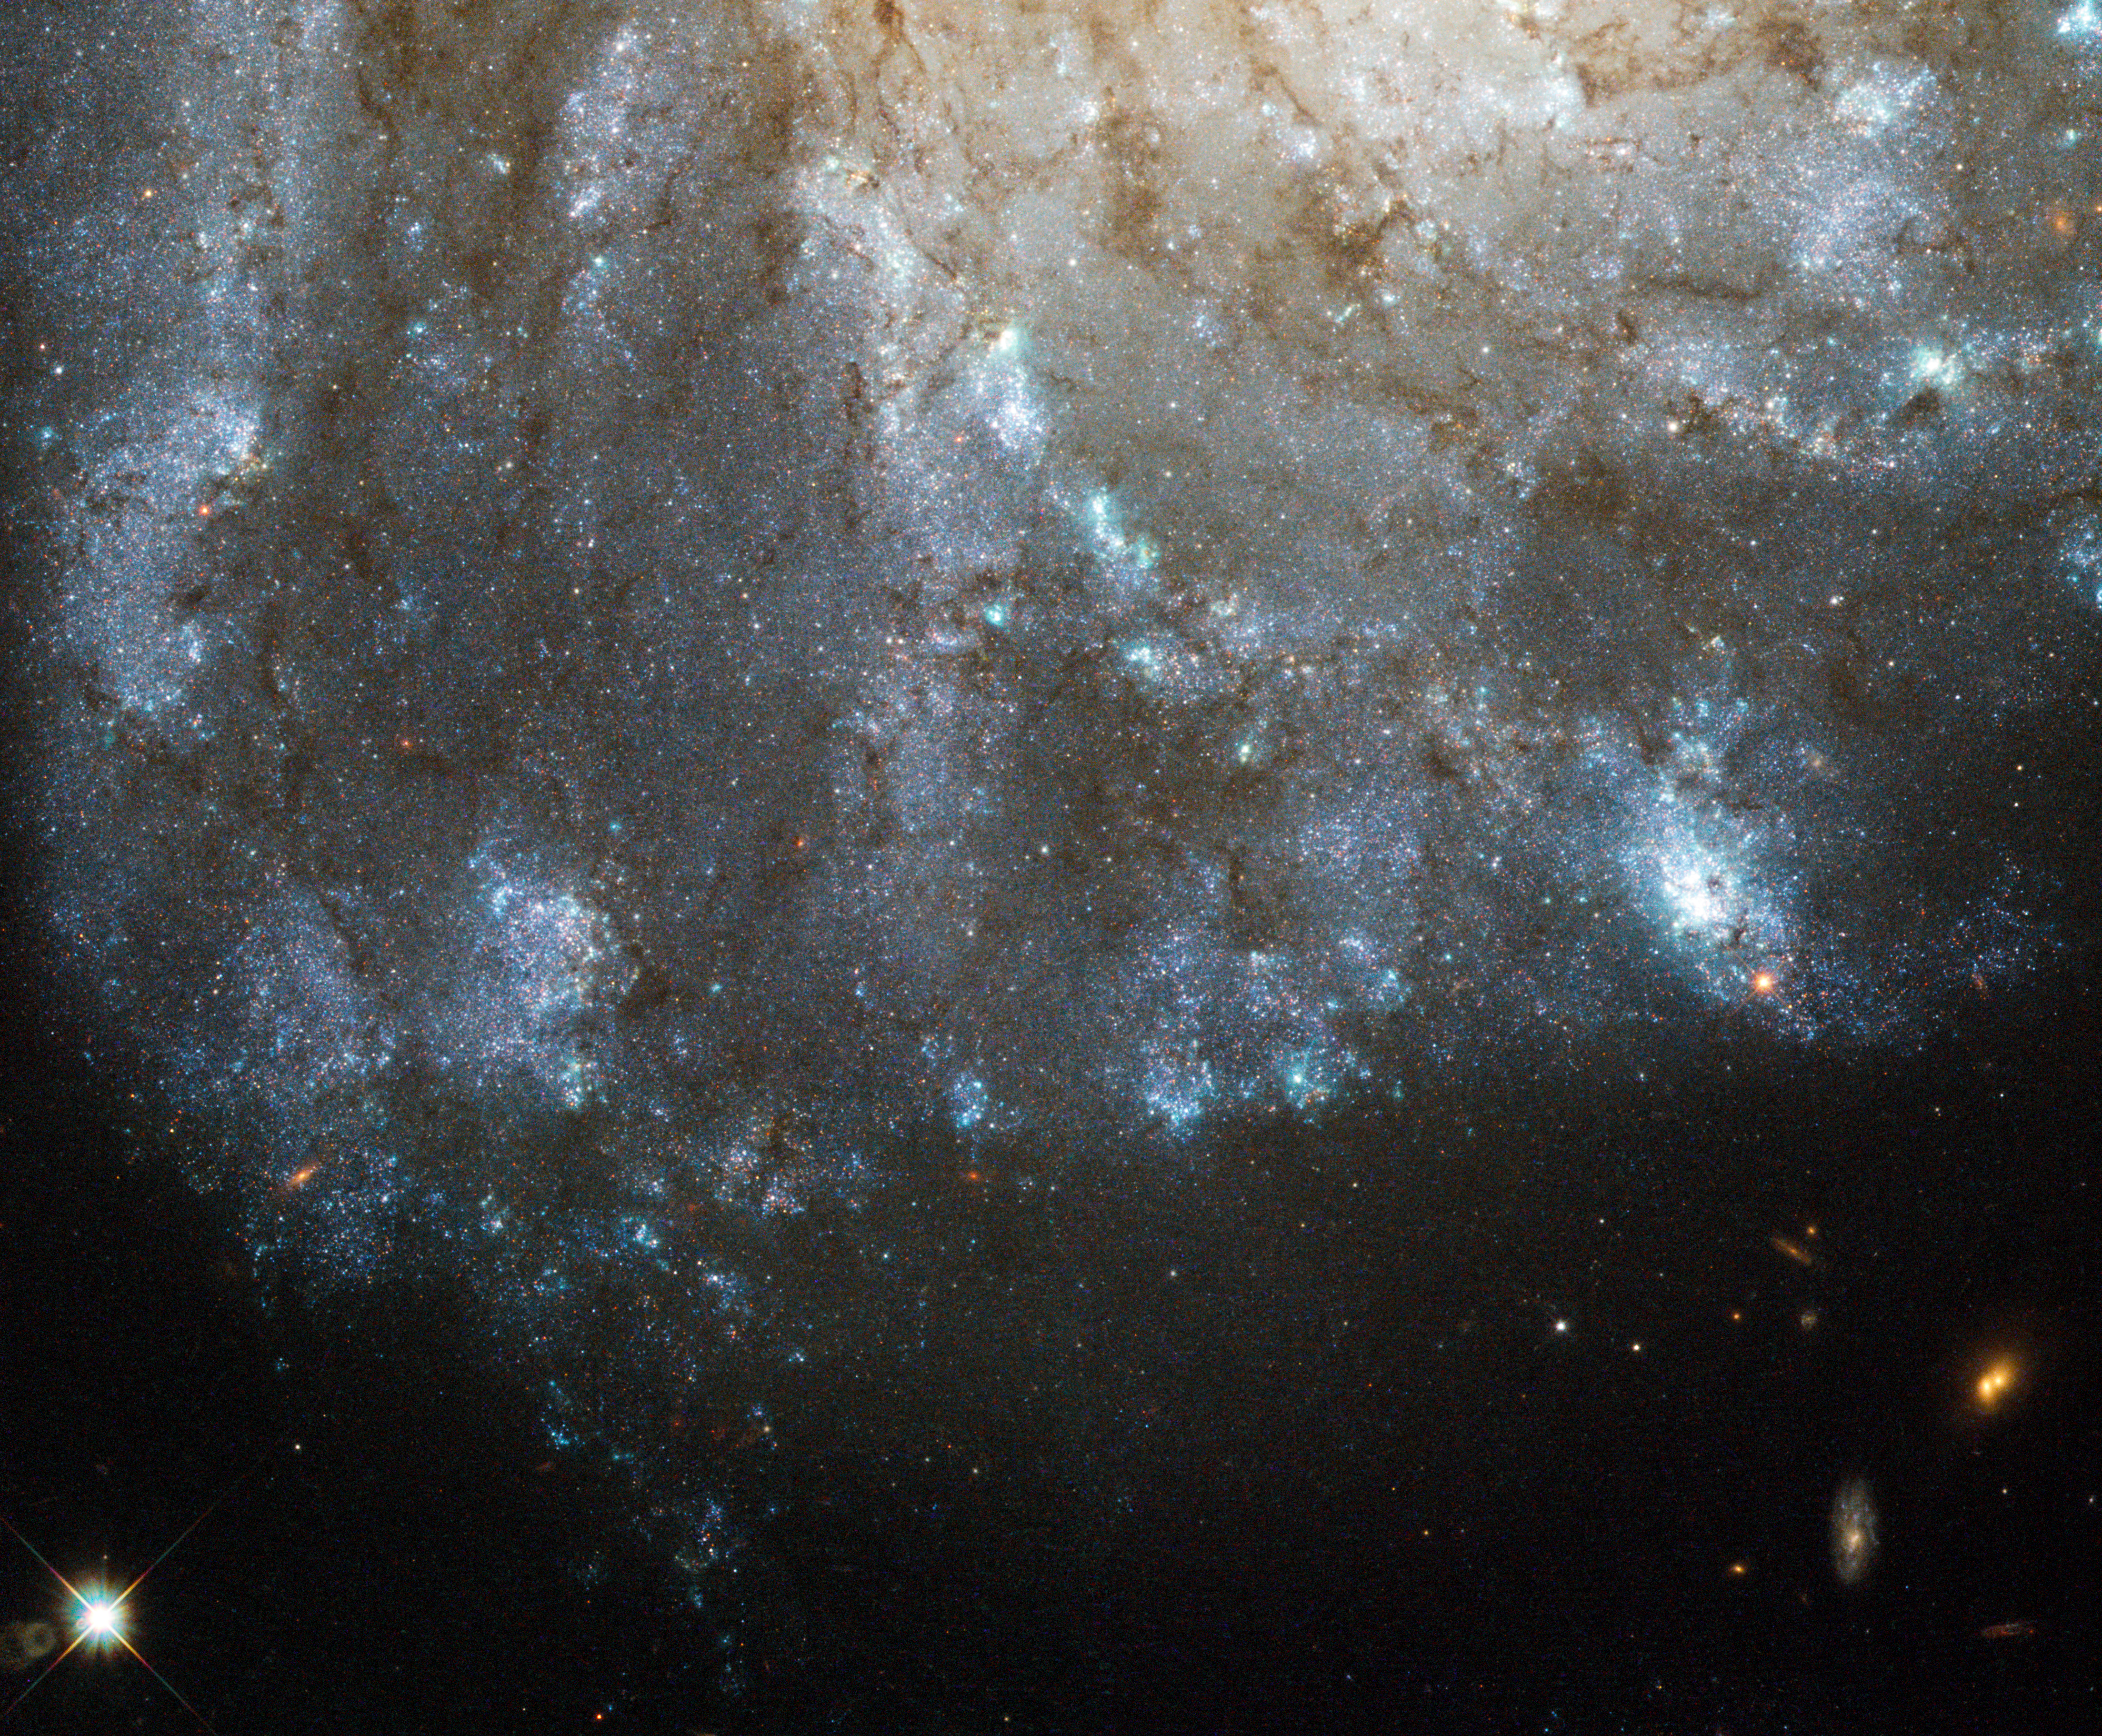

A bright spark in a nearby spiral galaxy

This image, taken by the NASA/ESA Hubble Space Telescope, shows a detailed view of the spiral arms on one side of the galaxy Messier 99. Messier 99 is a so-called grand design spiral, with long, large and clearly defined spiral arms — giving it a structure somewhat similar to the Milky Way.

Lying around 50 million light-years away, Messier 99 is one of over a thousand galaxies that make up the Virgo Cluster, the closest cluster of galaxies to us. Messier 99 itself is relatively bright and large, meaning it was one of the first galaxies to be discovered, way back in the 18th century. This earned it a place in Charles Messier’s famous catalogue of astronomical objects.

In recent years, a number of unexplained phenomena in Messier 99 have been studied by astronomers. Among these is the nature of one of the brighter stars visible in this image. Catalogued as PTF 10fqs, and visible as a yellow-orange star in the top-left corner of this image, it was first spotted by the Palomar Transient Facility, which scans the skies for sudden changes in brightness (or transient phenomena, to use astronomers’ jargon). These can be caused by different kinds of event, including variable stars and supernova explosions.

What is unusual about PTF 10fqs is that it has so far defied classification: it is brighter than a nova (a bright eruption on a star’s surface), but fainter than a supernova (the explosion that marks the end of life for a large star). Scientists have offered a number of possible explanations, including the intriguing suggestion that it could have been caused by a giant planet plunging into its parent star.

This Hubble image was made in June 2010, during the period when the outburst was fading, so PTF 10fqs’s location could be pinpointed with great precision. These measurements will allow other telescopes to home in on the star in future, even when the afterglow of the outburst has faded to nothing.

A version of this image of M 99 was entered into the Hubble’s Hidden Treasures Competition by contestant Matej Novak. Hidden Treasures is an initiative to invite astronomy enthusiasts to search the Hubble archive for stunning images that have never been seen by the general public. The competition is now closed and the winners will be announced soon.

Credit: ESA/Hubble & NASA. Acknowledgement: Matej Novak